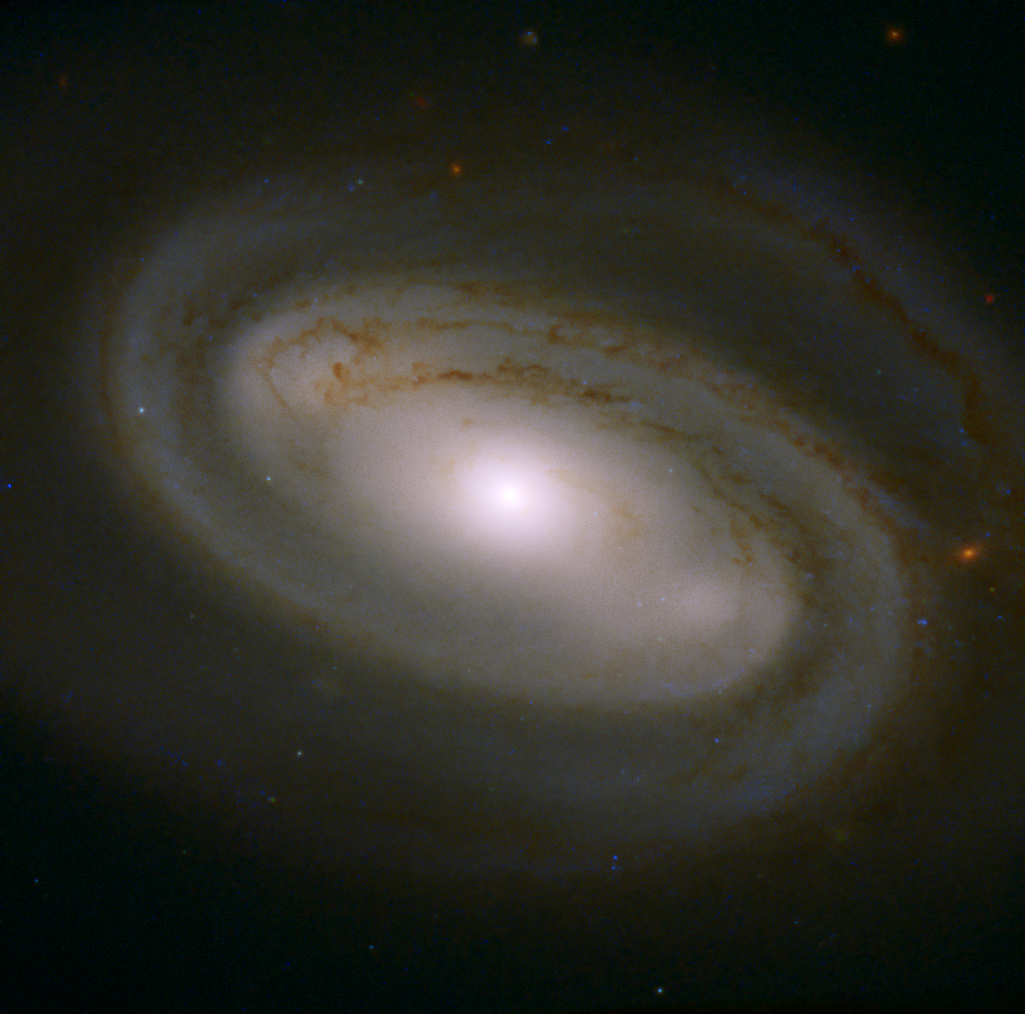

One Large Stellar Latte To Go

Far away in the Ursa Major constellation is a swirling galaxy that would not look out of place on a coffee made by a starry-eyed barista. NGC 3895 is a barred spiral galaxy that was first spotted by William Herschel in 1790 and was later observed by the NASA/ESA Hubble Space Telescope.

Hubble's orbit high above the Earth's distorting atmosphere allows astronomers to make the very high resolution observations that are essential to opening new windows on planets, stars and galaxies — such as this beautiful view of NGC 3895. The telescope is positioned approximately 570 km above the ground, where it whirls around Earth at 28 000 kilometres per hour and takes 96 minutes to complete one orbit.

Credit: ESA/Hubble, NASA, and R. Barrows